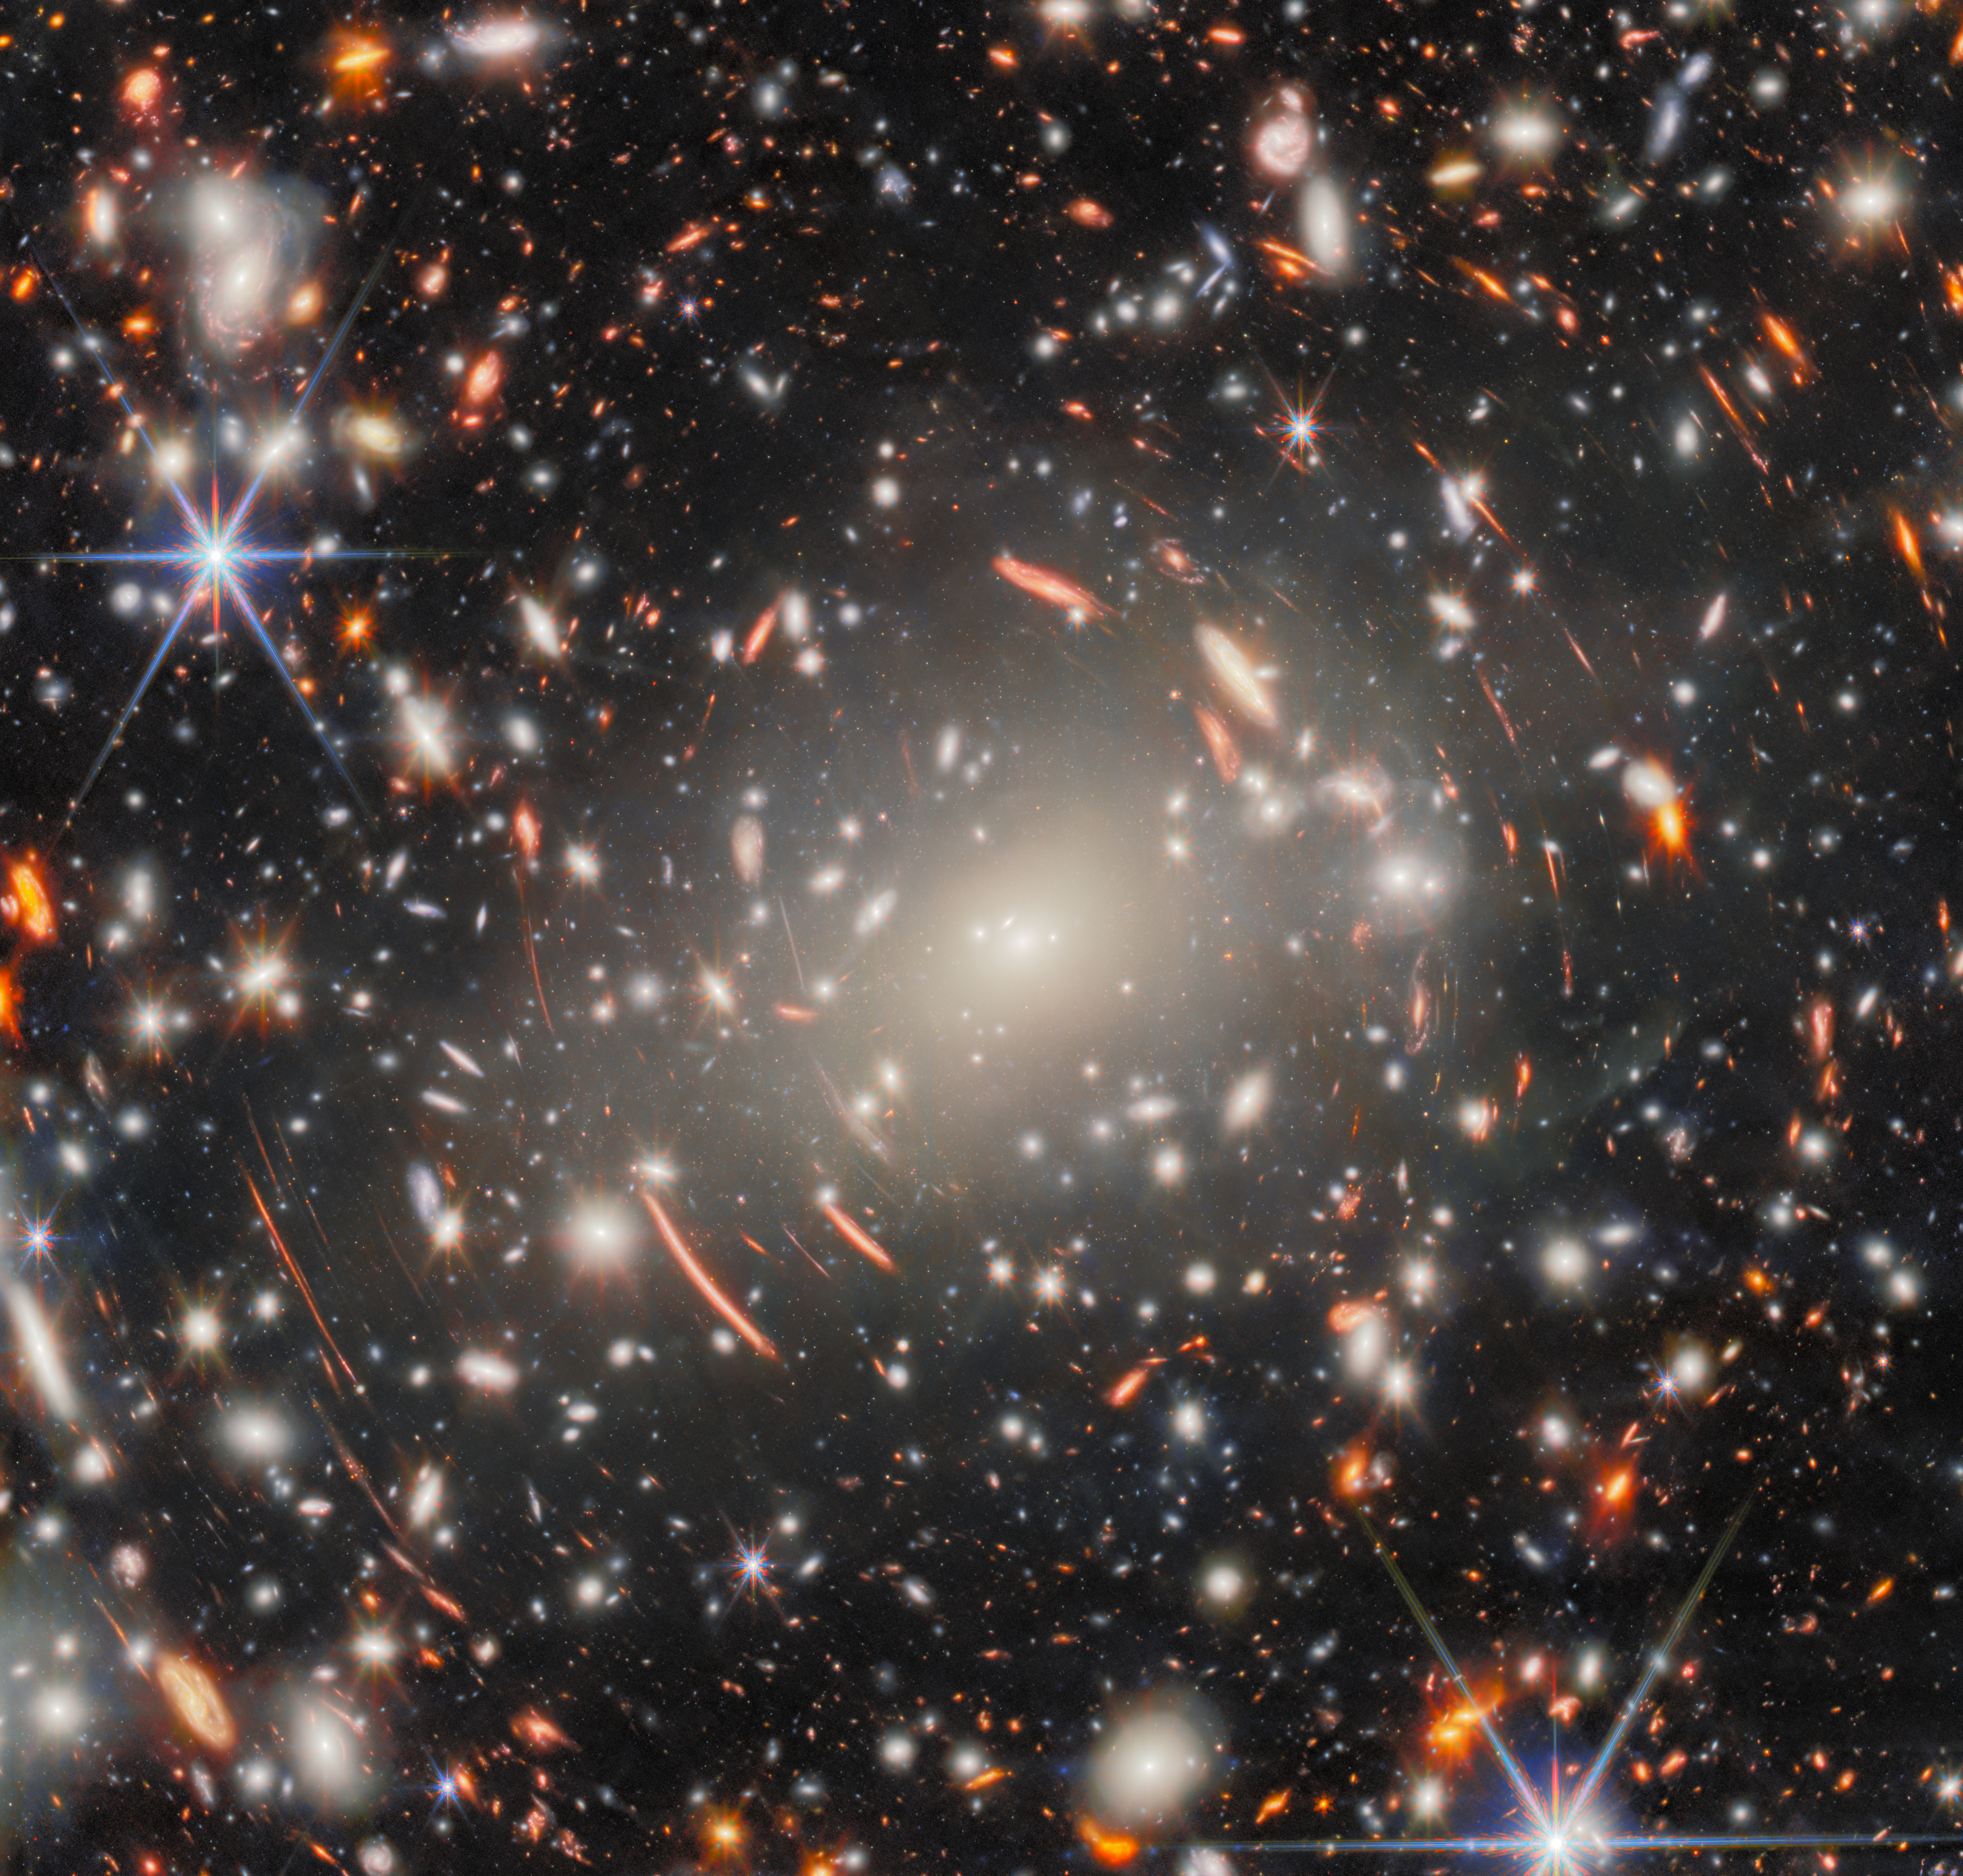

A glimpse of the distant past

The eye is first drawn, in this new NASA/ESA/CSA James Webb Space Telescope Picture of the Month, to the central mega-monster that is galaxy cluster Abell S1063. This behemoth collection of galaxies, lying 4.5 billion light-years from Earth in the constellation Grus (the Crane), dominates the scene. Looking more closely, this dense collection of heavy galaxies is surrounded by glowing streaks of light, and these warped arcs are the true object of scientists’ interest: faint galaxies from the Universe’s distant past.

Abell S1063 was previously observed by the NASA/ESA Hubble Space Telescope’s Frontier Fields programme. It is a strong gravitational lens: the galaxy cluster is so massive that the light of distant galaxies aligned behind it is bent around it, creating the warped arcs that we see here. Like a glass lens, it focuses the light from these faraway galaxies. The resulting images, albeit distorted, are both bright and magnified — enough to be observed and studied. This was the aim of Hubble’s observations, using the galaxy cluster as a magnifying glass to investigate the early Universe.

The new imagery from Webb’s Near-Infrared Camera (NIRCam) takes this quest even further back in time. This image showcases an incredible forest of lensing arcs around Abell S1063, which reveal distorted background galaxies at a range of cosmic distances, along with a multitude of faint galaxies and previously unseen features.

This image is what’s known as a deep field — a long exposure of a single area of the sky, collecting as much light as possible to draw out the most faint and distant galaxies that don’t appear in ordinary images. With 9 separate snapshots of different near-infrared wavelengths of light, totalling around 120 hours of observing time and aided by the magnifying effect of gravitational lensing, this is Webb’s deepest gaze on a single target to date. Focusing such observing power on a massive gravitational lens, like Abell S1063, therefore has the potential to reveal some of the very first galaxies formed in the early Universe.

The observing programme that produced this data, GLIMPSE (#3293, PIs: H. Atek & J. Chisholm), aims to probe the period known as Cosmic Dawn, when the Universe was only a few million years old. Studying the galaxies revealed by gravitational lensing has the potential to develop our understanding of the emergence of the first galaxies. Analysis of this NIRCam data by the GLIMPSE team has already produced candidates for galaxies that existed as early as 200 million years after the Big Bang, and hints of the elusive first population of stars in the Universe.

Credit: ESA/Webb, NASA & CSA, H. Atek, M. Zamani (ESA/Webb) Acknowledgement: R. Endsley